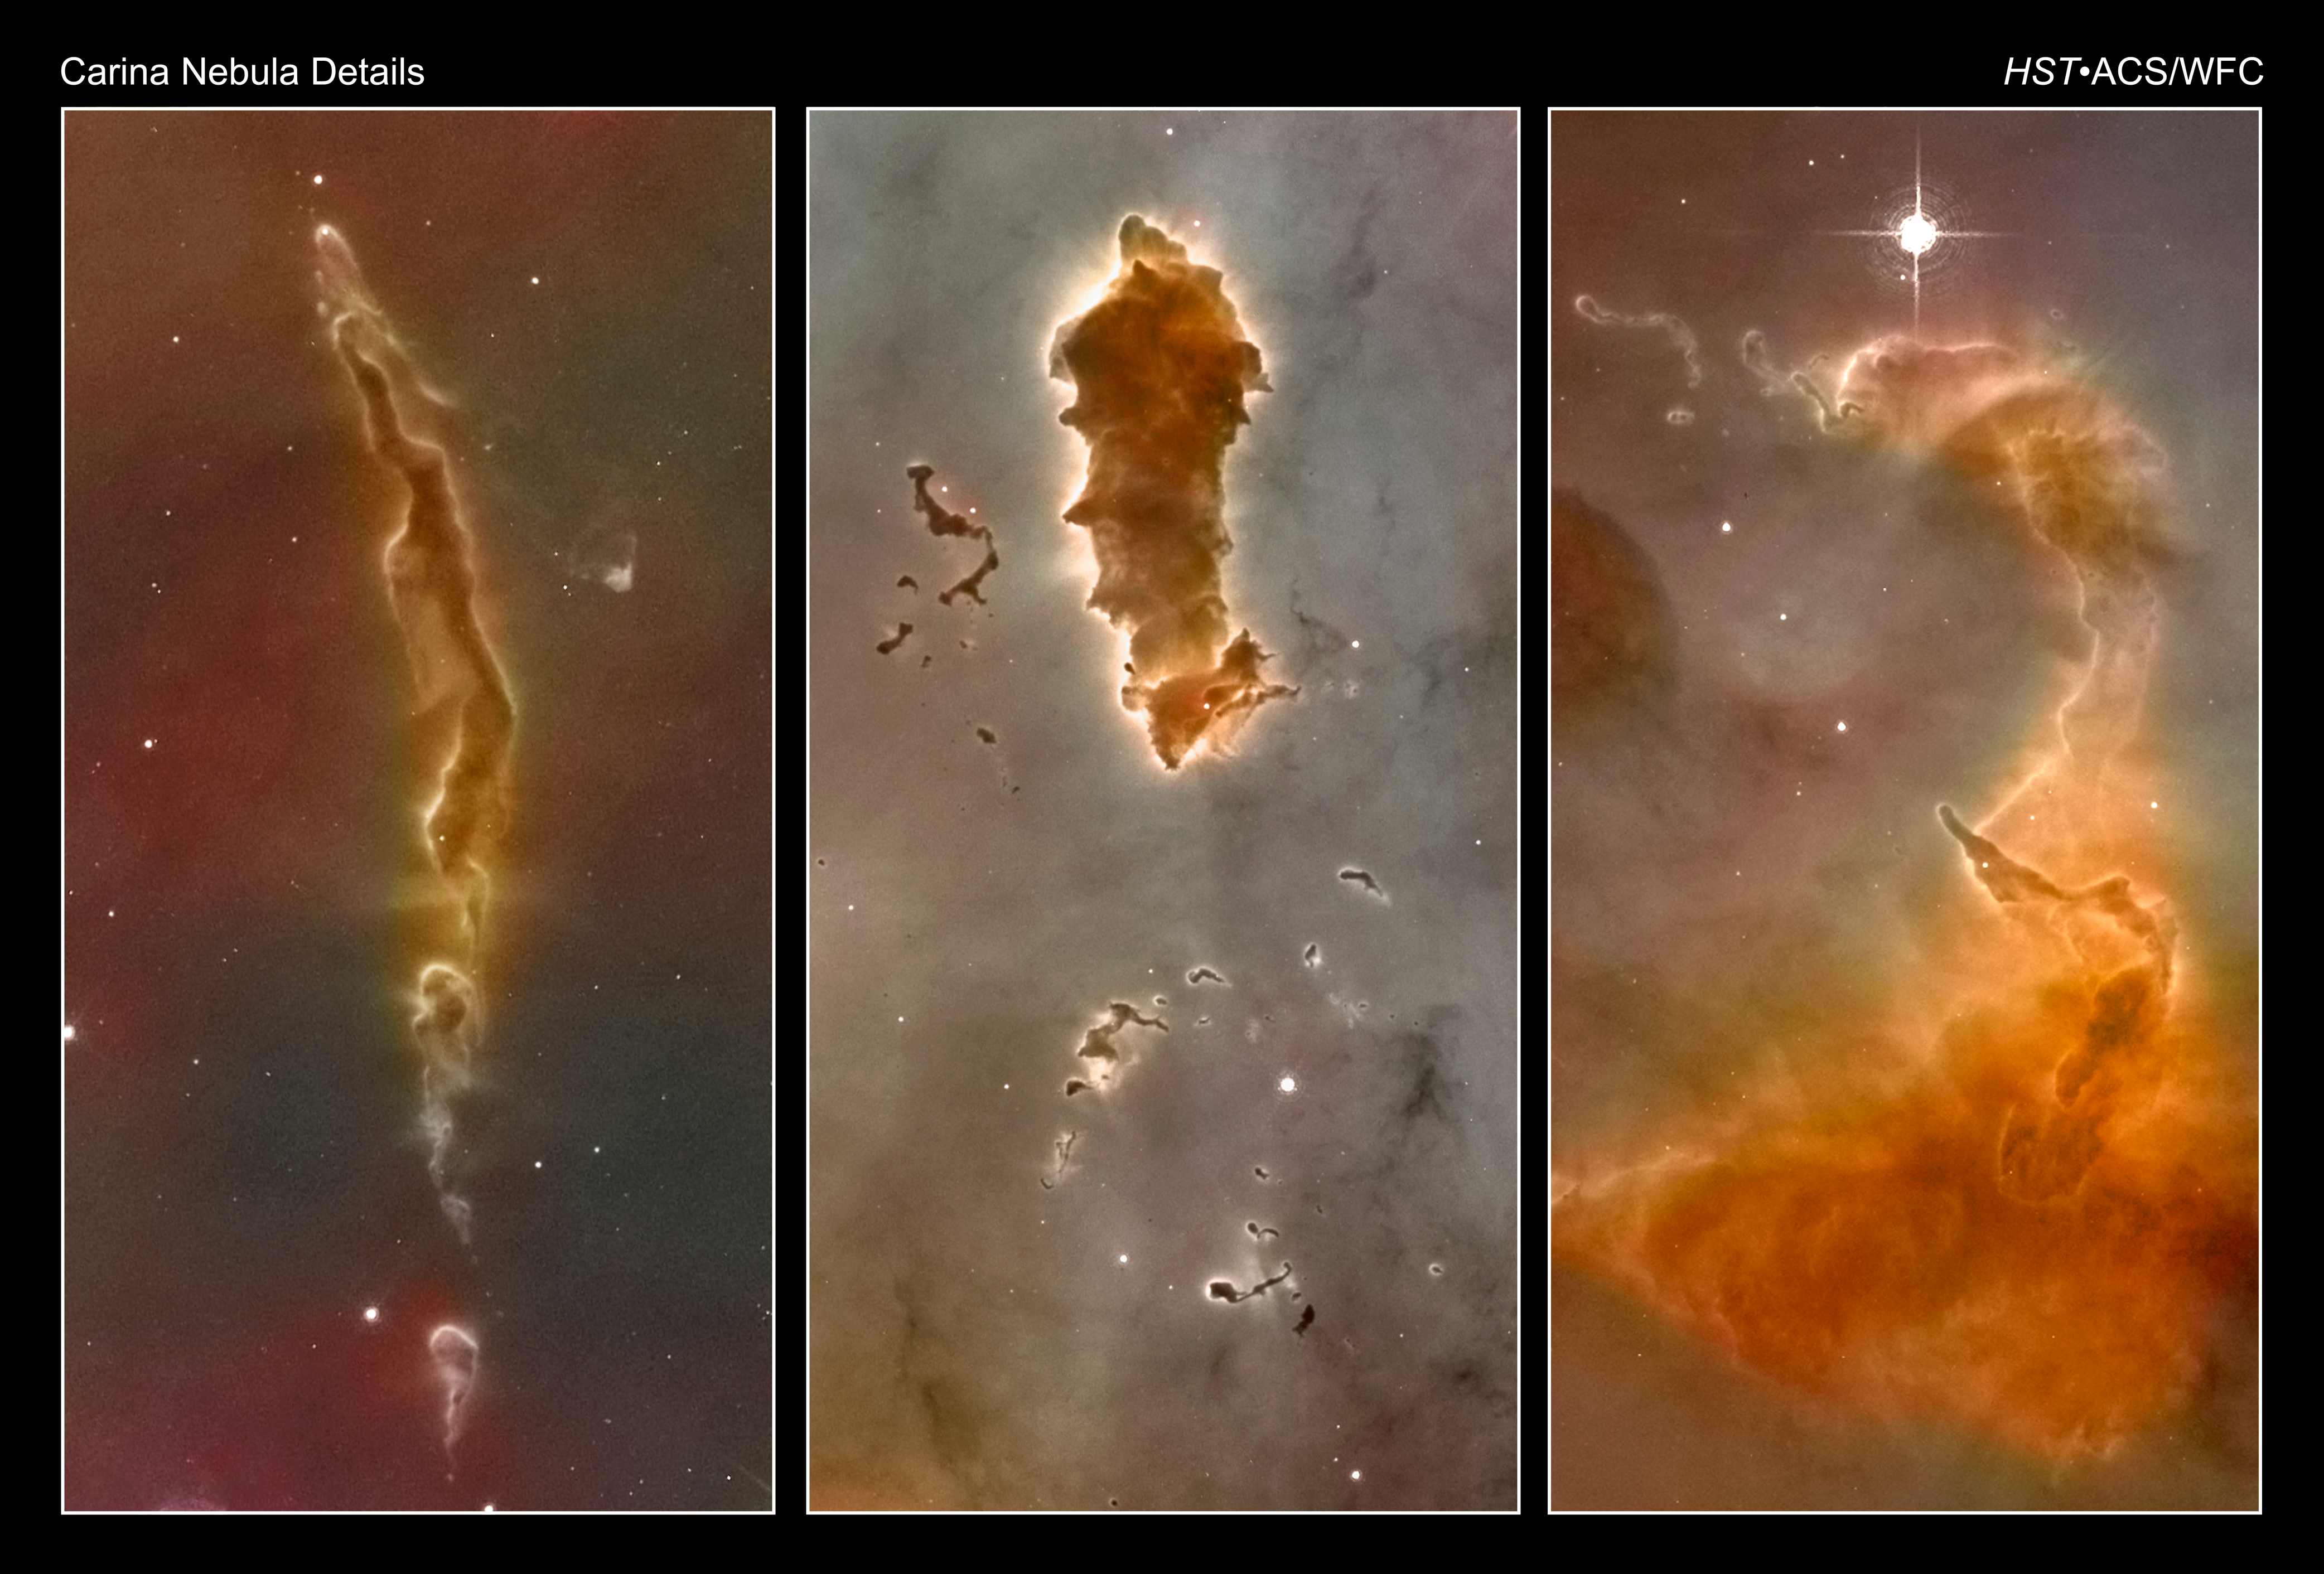

Carina Nebula Details

A series of so-called Bok globules from a mosaic of the Carina Nebula assembled from 48 frames taken with the Hubble Space Telescope's Advanced Camera for Surveys. The island-like clumps of dark clouds scattered across the nebula are nodules of dust and gas that have so far resisted being eaten away by photoionisation.

One globule nicknamed the "caterpillar" is shown in the central image. Its glowing edge indicates that it is being photoionized by the hottest stars in the cluster. It has been hypothesized that stars may form inside such dusty cocoons.

The Hubble images were taken in the light of ionized hydrogen. Colour information was added with data taken at the Cerro Tololo Inter-American Observatory in Chile. Red corresponds to sulphur, green to hydrogen, and blue to oxygen emission.

Credit: NASA, ESA, N. Smith (University of California, Berkeley), and The Hubble Heritage Team (STScI/AURA)